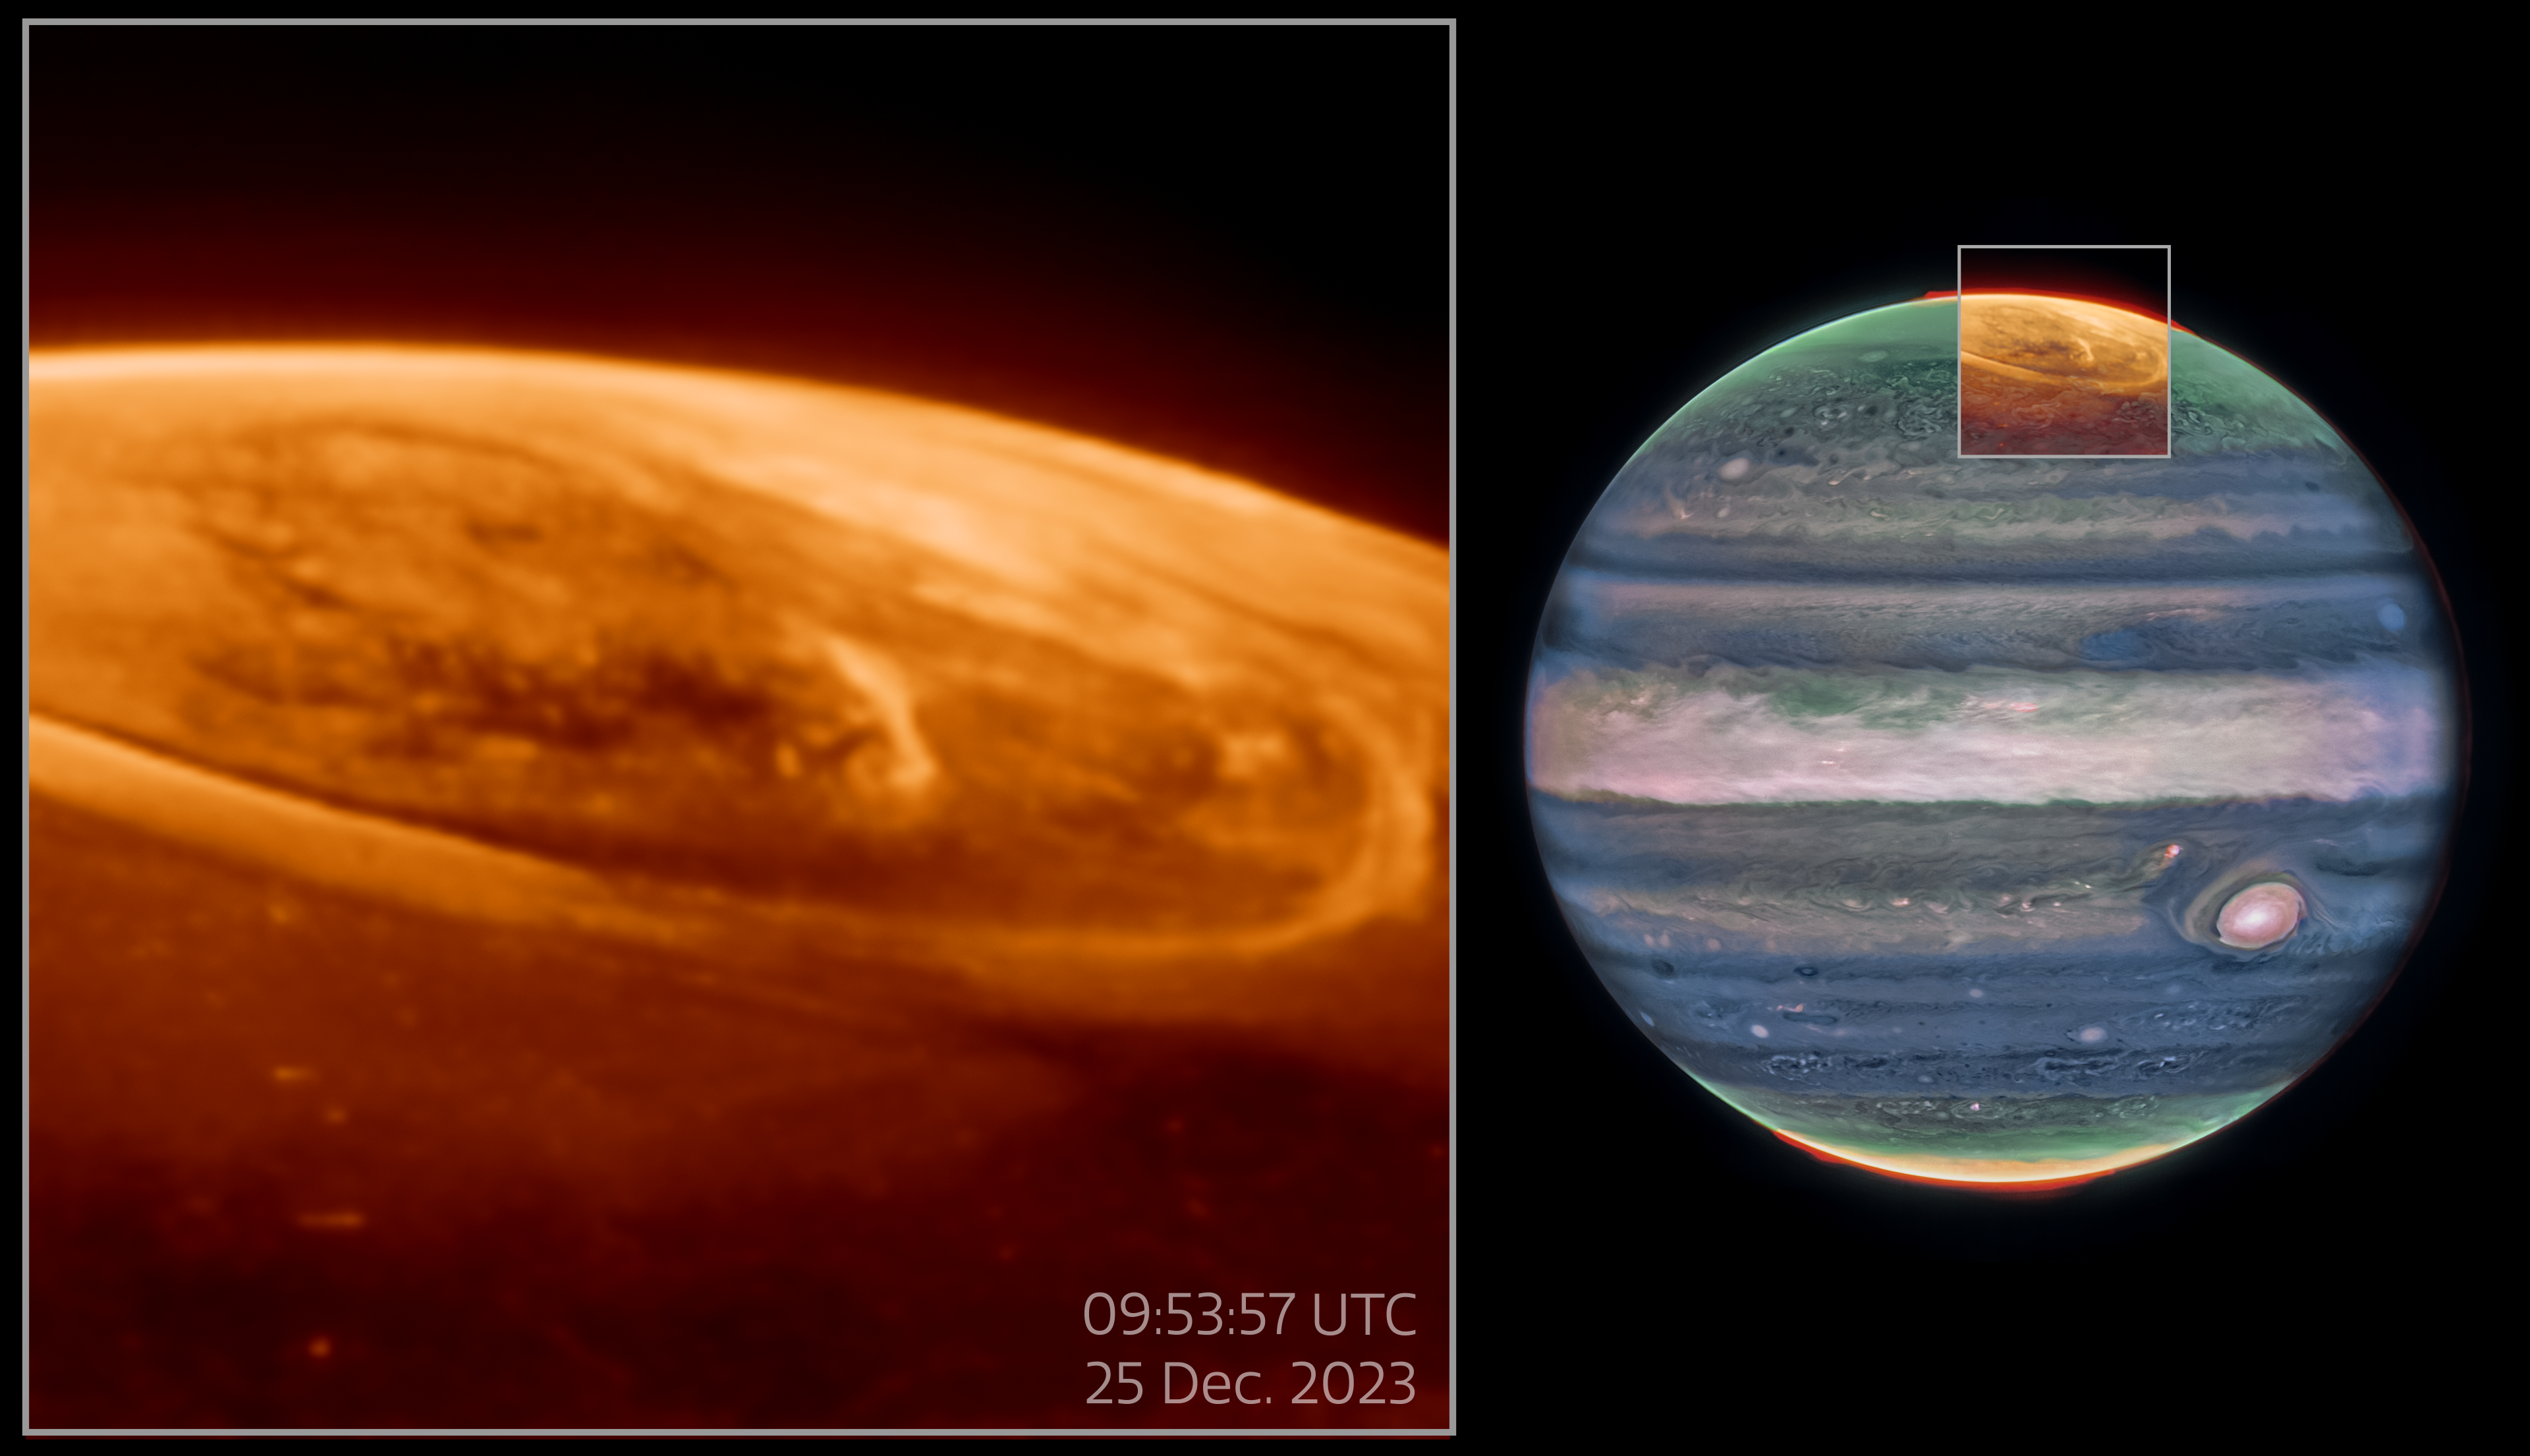

Pullout of aurora observations on Jupiter

The NASA/ESA/CSA James Webb Space Telescope has captured new details of the auroras on our Solar System’s largest planet. The dancing lights observed on Jupiter are hundreds of times brighter than those seen on Earth.

These observations of Jupiter’s auroras (shown on the left of the above image) were captured with Webb’s Near-InfraRed Camera (NIRCam) on 25 December 2023 (F335M filter). Scientists found that the emission from the trihydrogen ion, known as H3+, is far more variable than previously believed. H3+ is created by the impact of high energy electrons on molecular hydrogen. Because this emission shines brightly in the infrared, Webb’s instruments are well equipped to observe it. The image on the right shows the planet Jupiter to indicate the location of the observed auroras, which was originally published in 2023 (F164N, F212N, and F360M filters).

A video of these observations can be found here.

Credit: NASA, ESA, CSA, STScI, Ricardo Hueso (UPV), Imke de Pater (UC Berkeley), Thierry Fouchet (Observatory of Paris), Leigh Fletcher (University of Leicester), Michael H. Wong (UC Berkeley), Joseph DePasquale (STScI), J. Nichols (University of Leicester), M. Zamani (ESA/Webb)